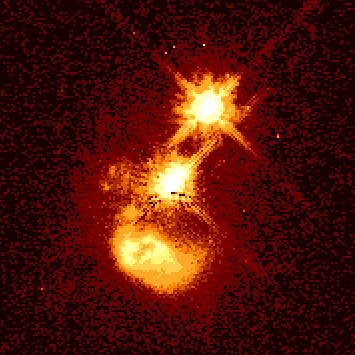

Quasar IRAS 04505-2958

The photo reveals evidence of a catastrophic collision between two galaxies traveling at about 1 million mph.

The debris from this collision may be fueling quasar IRAS04505-2958, which is 3 billion light-years from Earth.

Credit: John Bahcall (Institute for Advanced Study, Princeton) Mike Disney (University of Wales) and NASA/ESA